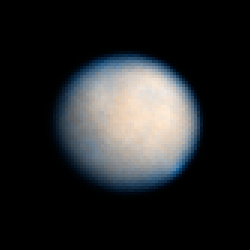

Ceres: 24 January 2004 02:52 UT

Observations of Ceres, the largest known asteroid, have revealed that the object may be a "mini planet," sharing many characteristics of the rocky, terrestrial planets like Earth.

Credit: NASA, ESA, J. Parker (Southwest Research Institute), P. Thomas (Cornell University), L. McFadden (University of Maryland, College Park), and M. Mutchler and Z. Levay (STScI)